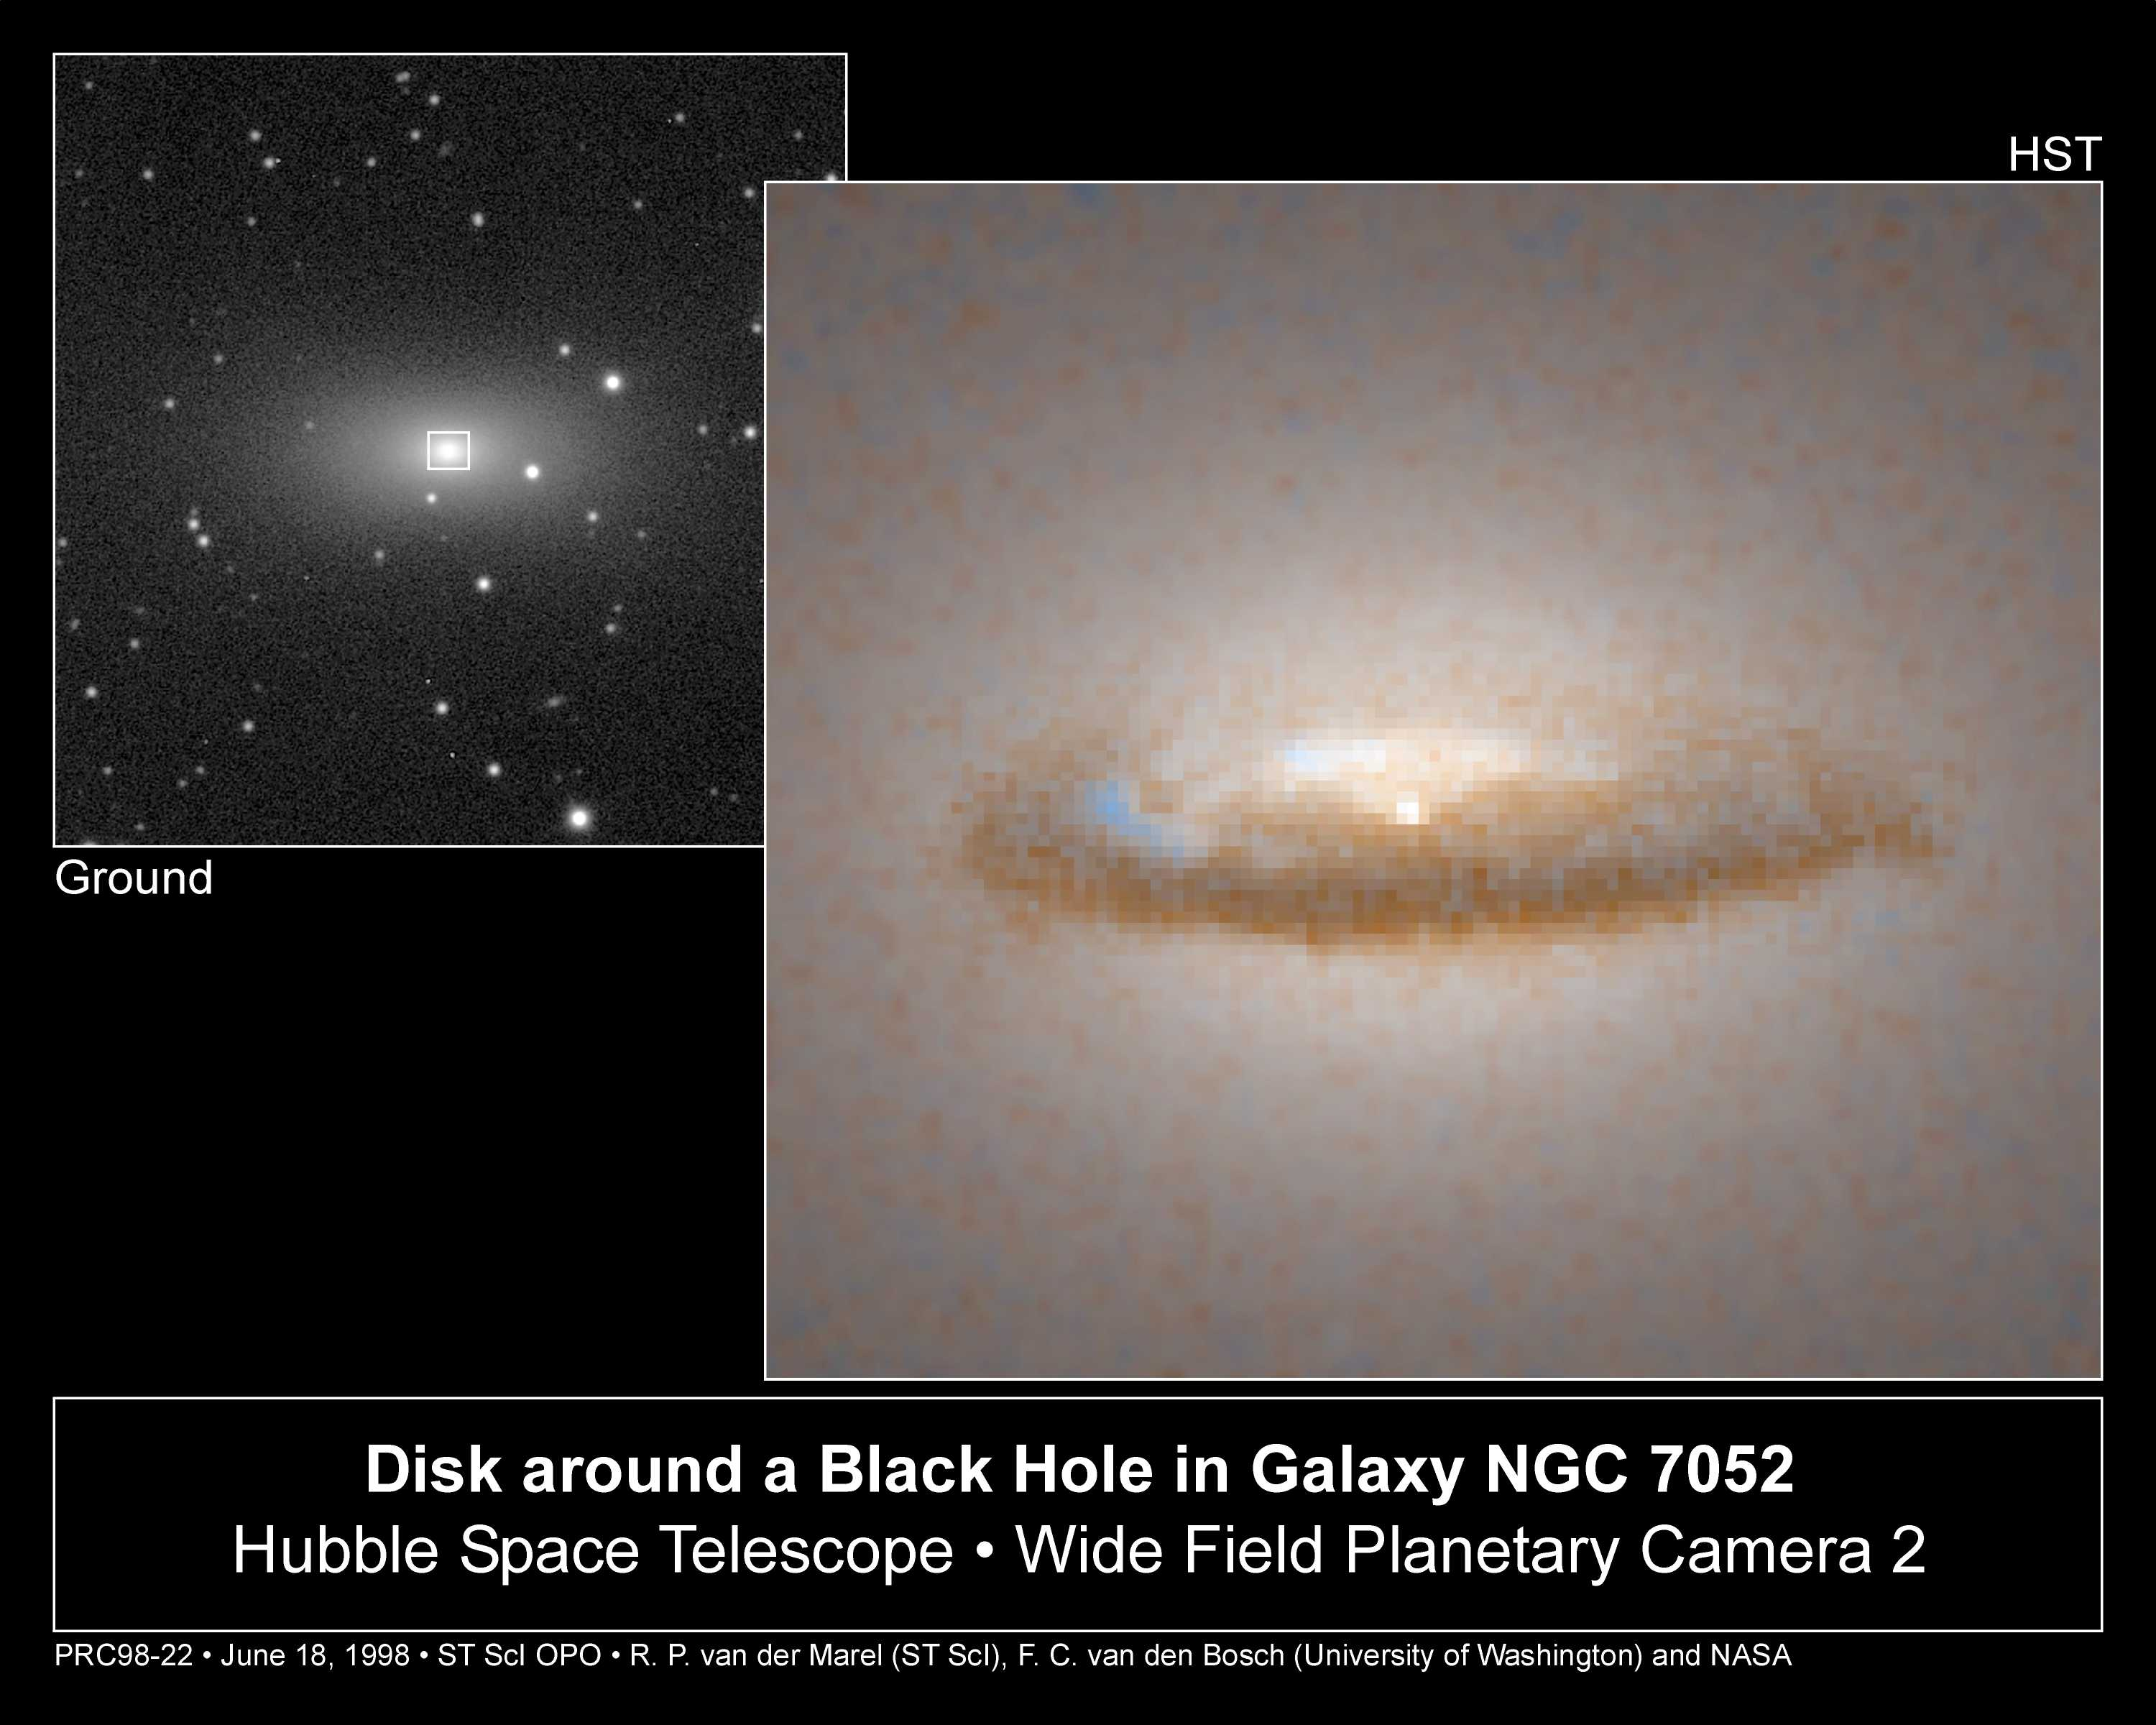

Disk around a Black Hole in Galaxy NGC 7052

Resembling a gigantic hubcap in space, a 3, 700 light-year-diameter dust disk encircles a 300 million solar-mass black hole in the centre of the elliptical galaxy NGC 7052.

The disk, possibly a remnant of an ancient galaxy collision, will be swallowed up by the black hole in several billion years.

Because the front end of the disk eclipses more stars than the back, it appears darker. Also, because dust absorbs blue light more effectively than red light, the disk is redder than the rest of the galaxy (this same phenomenon causes the Sun to appear red when it sets in a smoggy afternoon).

Credit: Roeland P. van der Marel (STScI), Frank C. van den Bosch (Univ. of Washington), and NASA/ESA